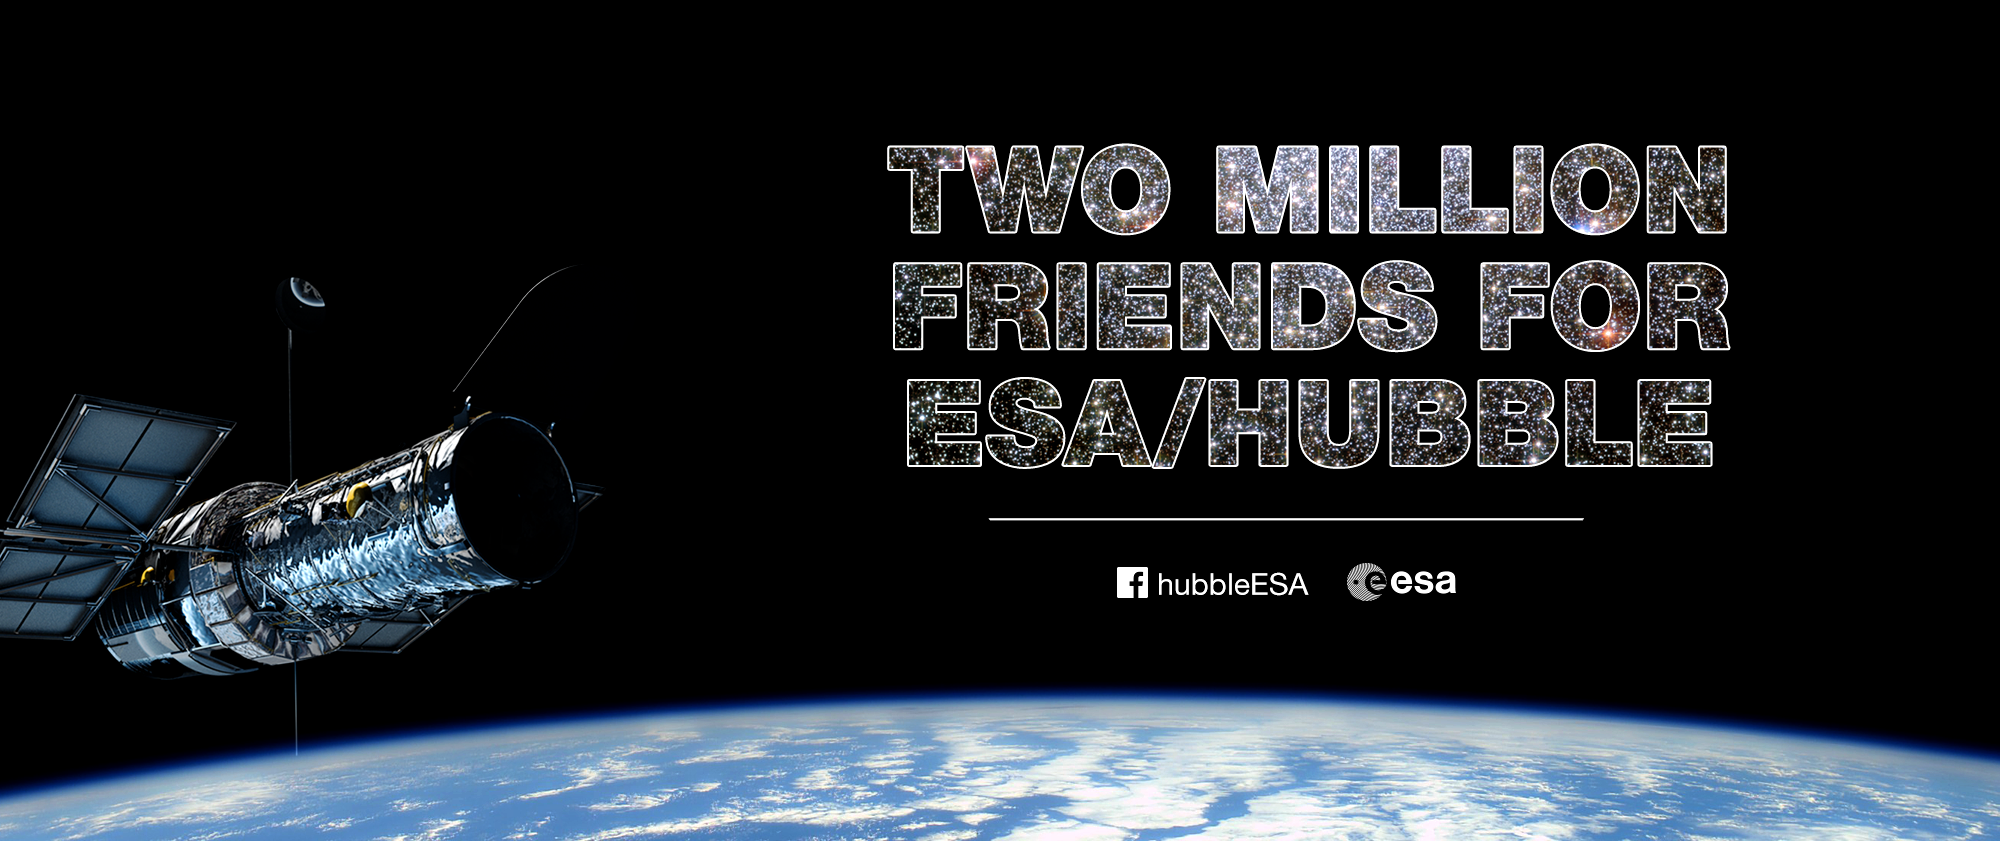

Two million friends

In April 2016 ESA/Hubble acquired its two millionth friend on Facebook.

Credit: ESO